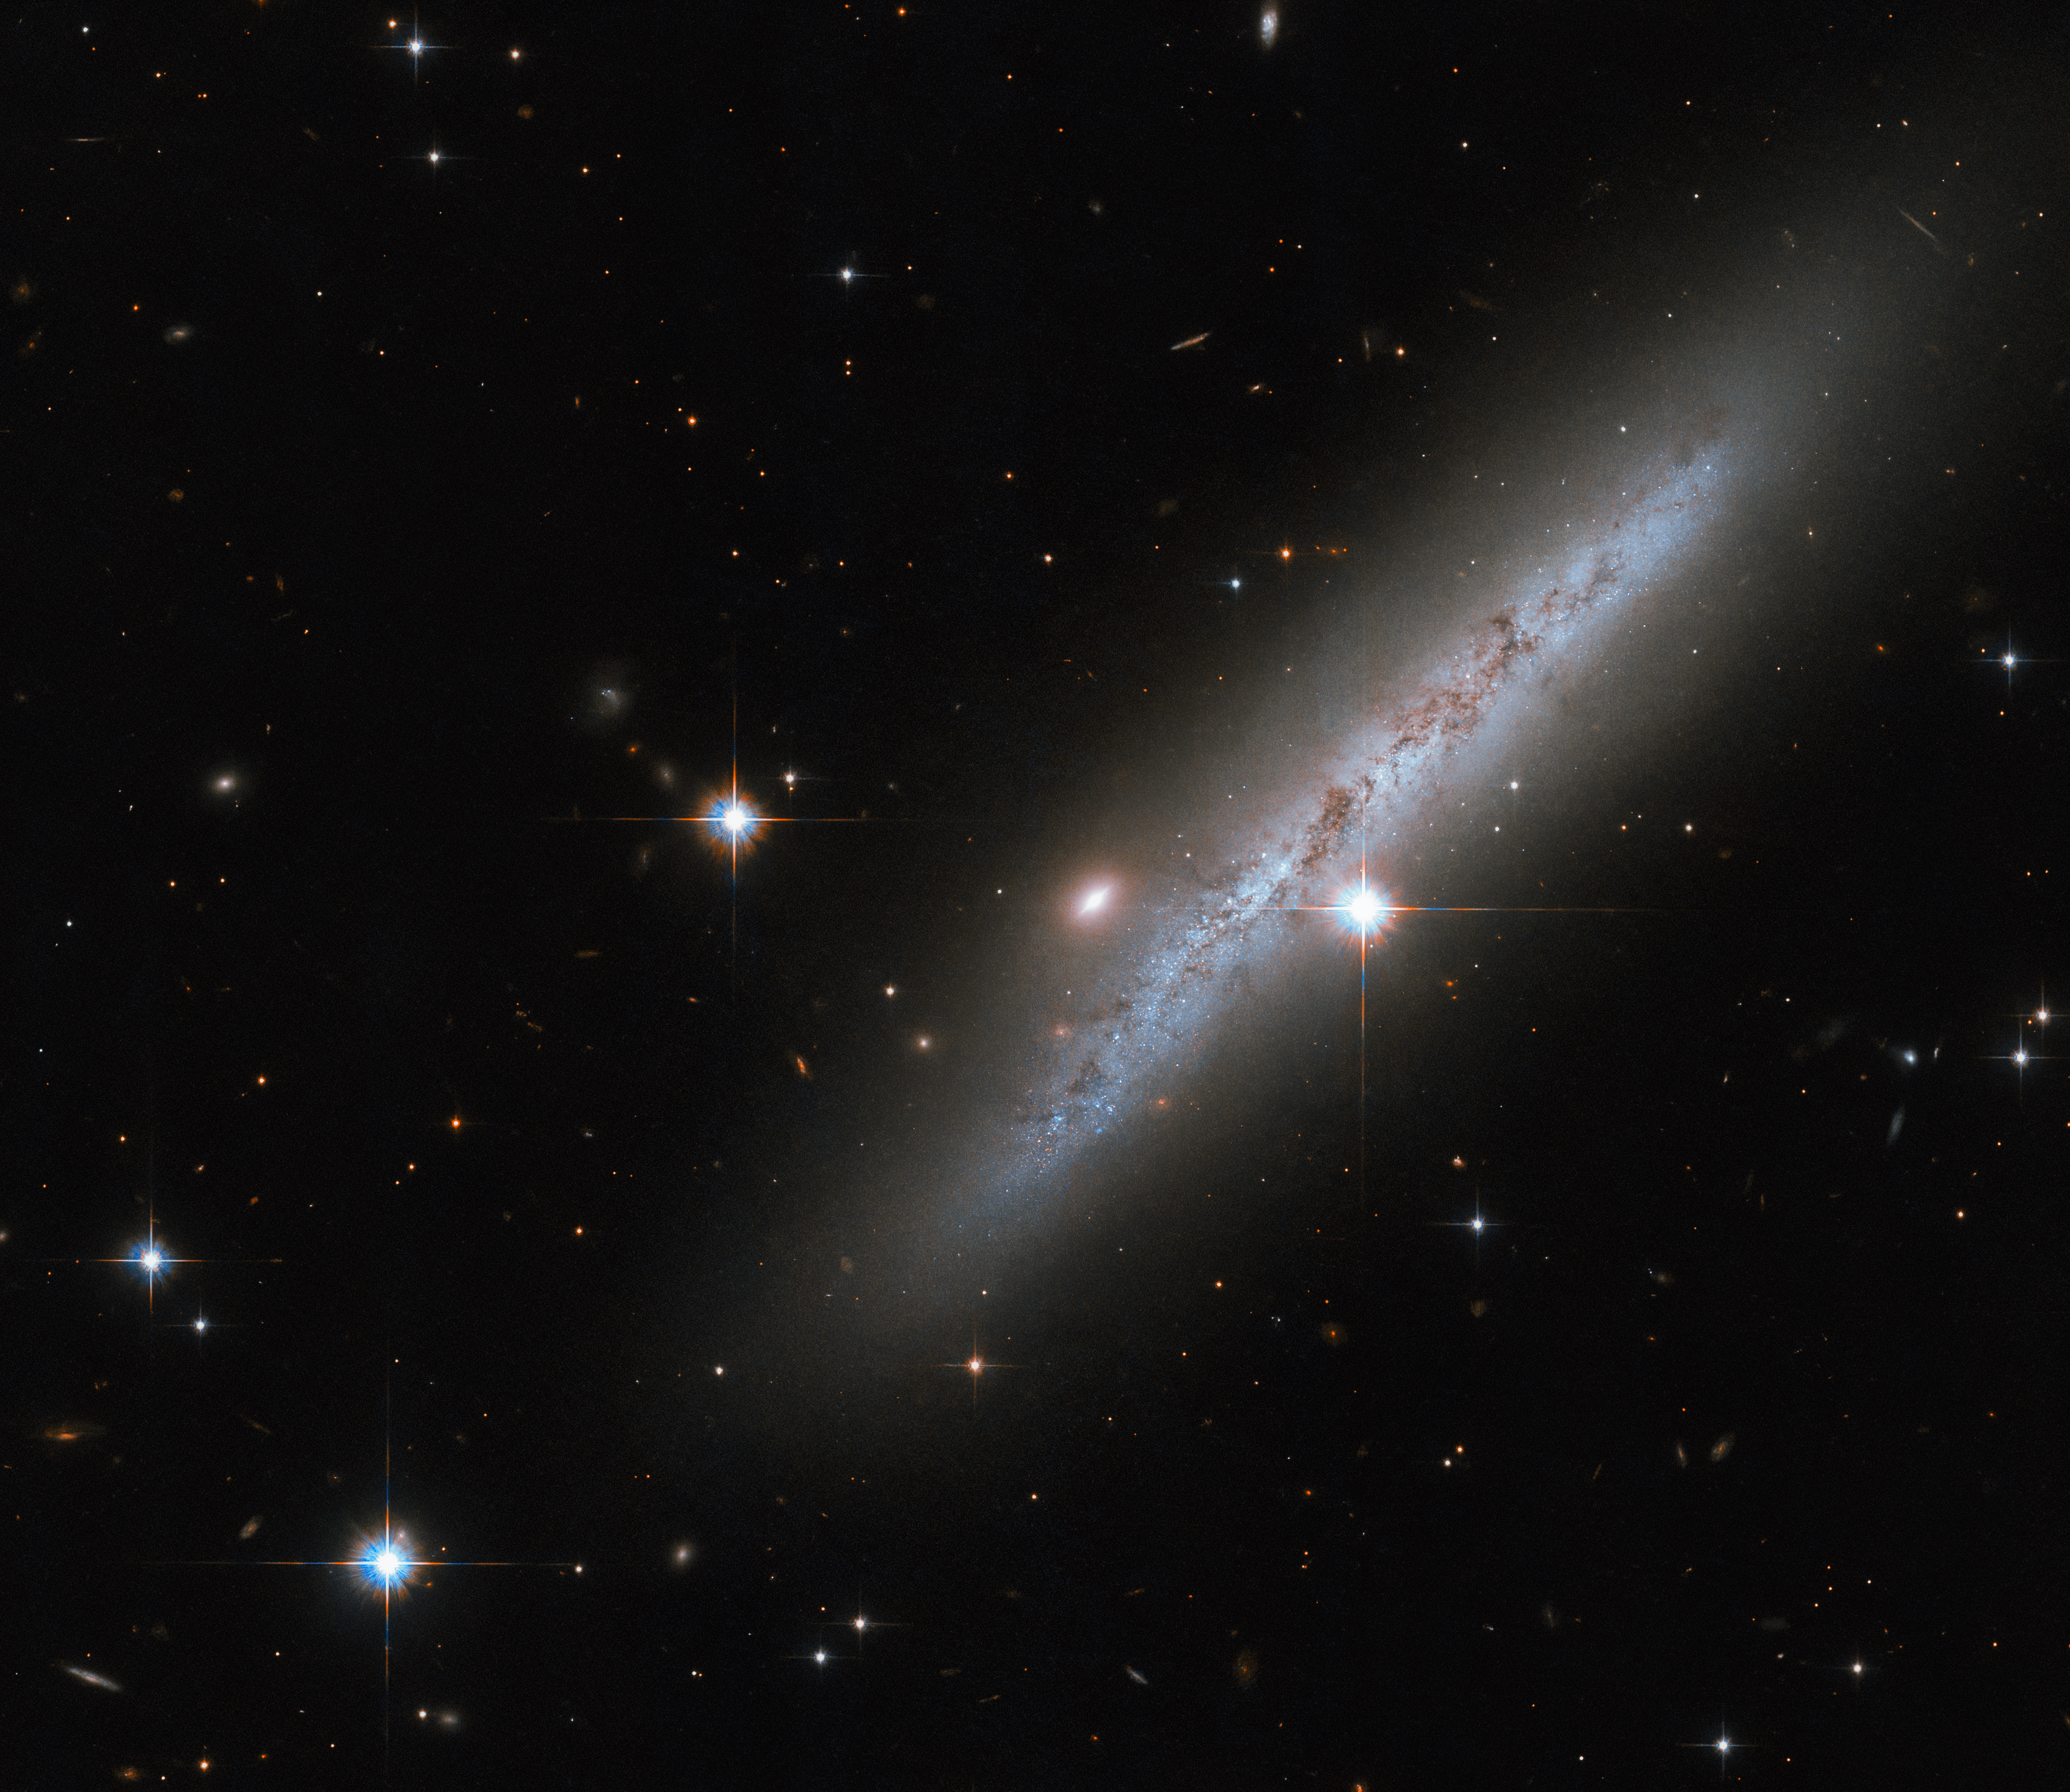

Aftermath of a cosmic explosion

The somewhat amorphous spiral galaxy UGC 2890 appears side-on in this image from the NASA/ESA Hubble Space Telescope, with bright foreground stars studding the image. This galaxy lies around 30 million light-years away in the constellation Camelopardalis. In 2009 astronomers spotted a catastrophically powerful supernova explosion in UGC 2890. While the supernova itself has long since faded from view, Hubble recently took a break from its regular observing schedule to inspect the aftermath of this explosive event.

A Type II supernova is a spectacularly energetic explosion that marks the violent death of a massive star. As it runs out of the elements necessary to fuel nuclear fusion, the core of a massive star flickers out and stops producing energy. With nothing to support the crushing force of gravity, the core of the star shrinks and then suddenly implodes, leaving the star’s outer layers to collapse inwards and rebound out into space as a supernova explosion.

This observation is one of many Hubble investigations of Type II supernovae. Astronomers turned to Hubble’s Advanced Camera for Surveys to explore the surroundings of Type II supernovae in the hope of discovering the ages and masses of stars in the neighbourhood. This will reveal insights into the types of stars that eventually create Type II supernovae, as well as revealing any stellar survivors of colossal supernova explosions.

Credit: ESA/Hubble & NASA, C. Kilpatrick